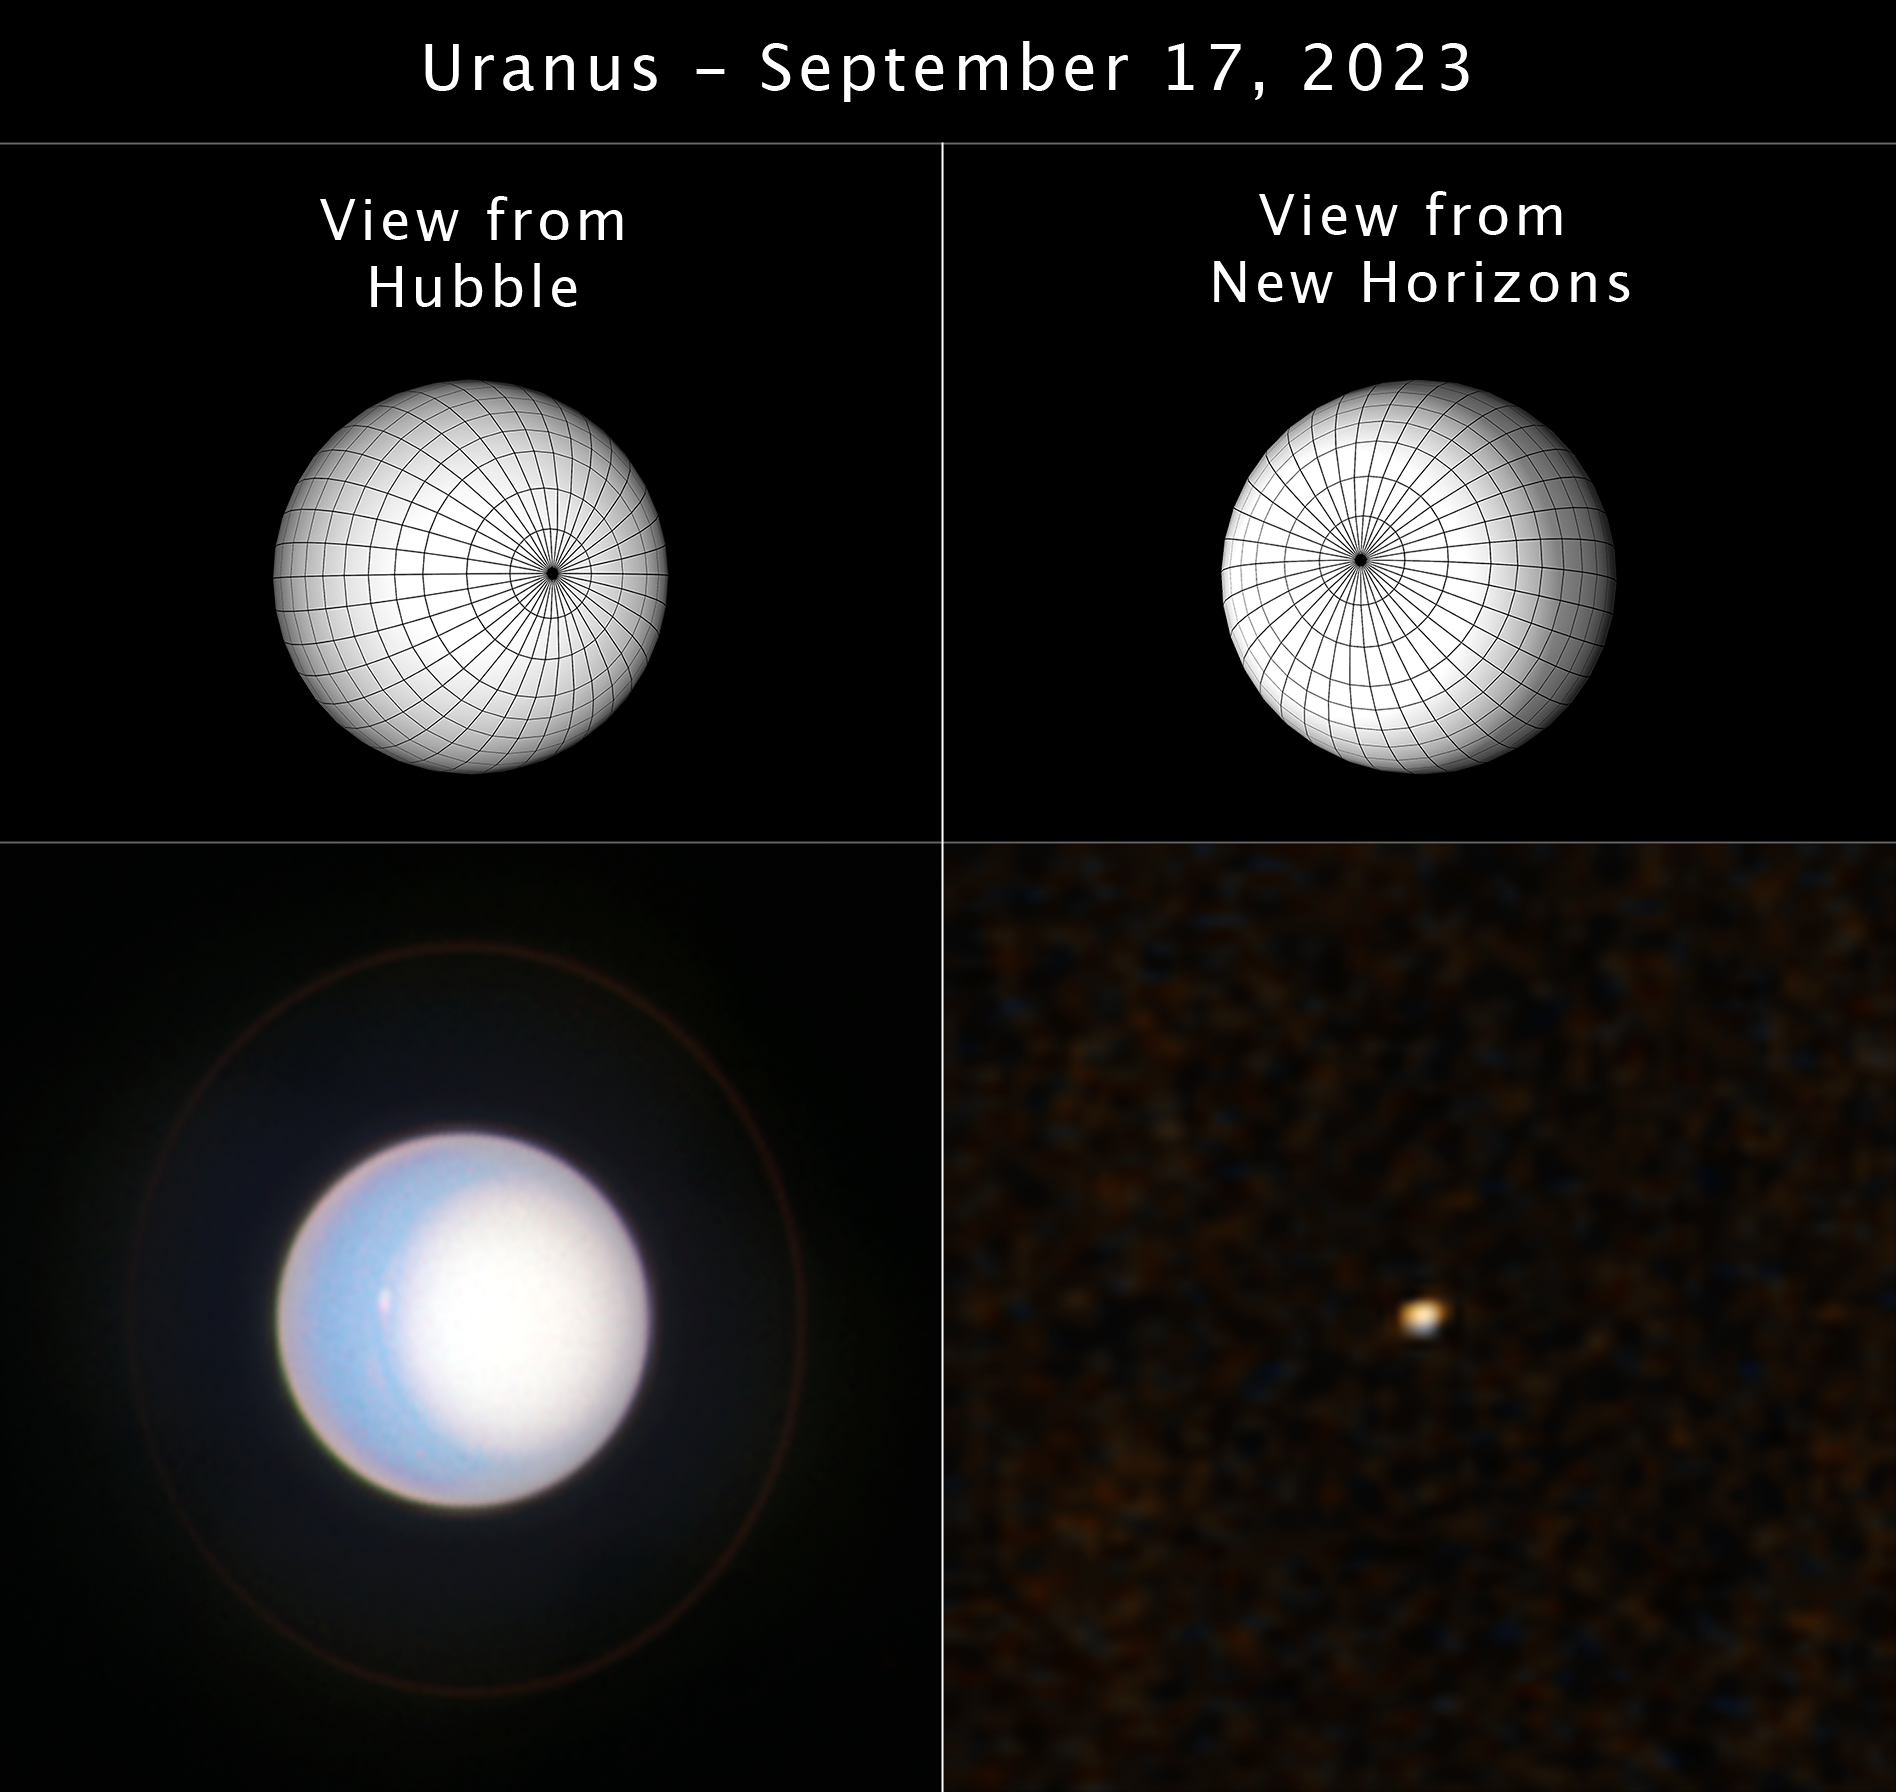

Hubble and New Horizons View of Uranus

In this image, two three-dimensional shapes (top) of Uranus are compared to the actual views of the planet from the NASA/ESA Hubble Space Telescope (bottom left) and NASA’s New Horizon’s spacecraft (bottom right). These two missions recently simultaneously observed the gas giant, comparing high-resolution images from Hubble to the smaller view from New Horizons. This combined perspective will help researchers learn more about what to expect while imaging planets around other stars with future observatories.

By knowing the “truth” of what the planet looks like from Hubble, researchers are able to confirm or refute what is interpreted from the New Horizons data. In this study, the planet was viewed by Hubble when it was at full phase, when the entire sunlit side of the planet was visible. By New Horizons, Uranus was viewed at partial and high phase, when only a portion of the planet is illuminated by the Sun.

Researchers can only directly image exoplanets at ‘partial phases,’ when only a portion of the planet is illuminated by their star.

In the New Horizons image, Uranus was dimmer than predicted at partial and high phase angles, showing that the atmosphere reflects light differently at partial phase, as seen by New Horizons, than it does at full phase, as seen by Hubble.

Credit: S. Hasler (MIT), J. DePasquale (STScI), J. Olmstead (STScI), NASA, ESA, CSA